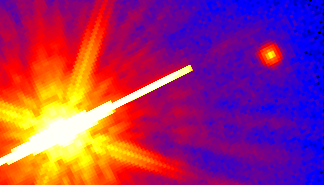

Cool Star

This is a Hubble Space Telescope picture of one of the least massive and coolest stars even seen (upper right). It is a diminutive companion to the K dwarf star called GL 105A (also known as HD 16160) seen at lower left. The binary pair is located 27 light-years away in the constellation Cetus.

Credit: D. Golimowski (Johns Hopkins University), and NASA/ESA